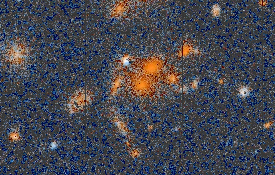

Distant galaxy cluster HST002013+28366

This cluster of galaxies lies in the constellation of Andromeda a few degrees from the star Alpheratz in the northeast corner of the constellation Pegasus. It is at an estimated distance of 4 billion light-years, which means the light we are seeing from the cluster is as it appeared when the universe was roughly 2/3 of its present age.

Credit: K. Ratnatunga, R. Griffiths (Carnegie Mellon University); and NASA/ESA